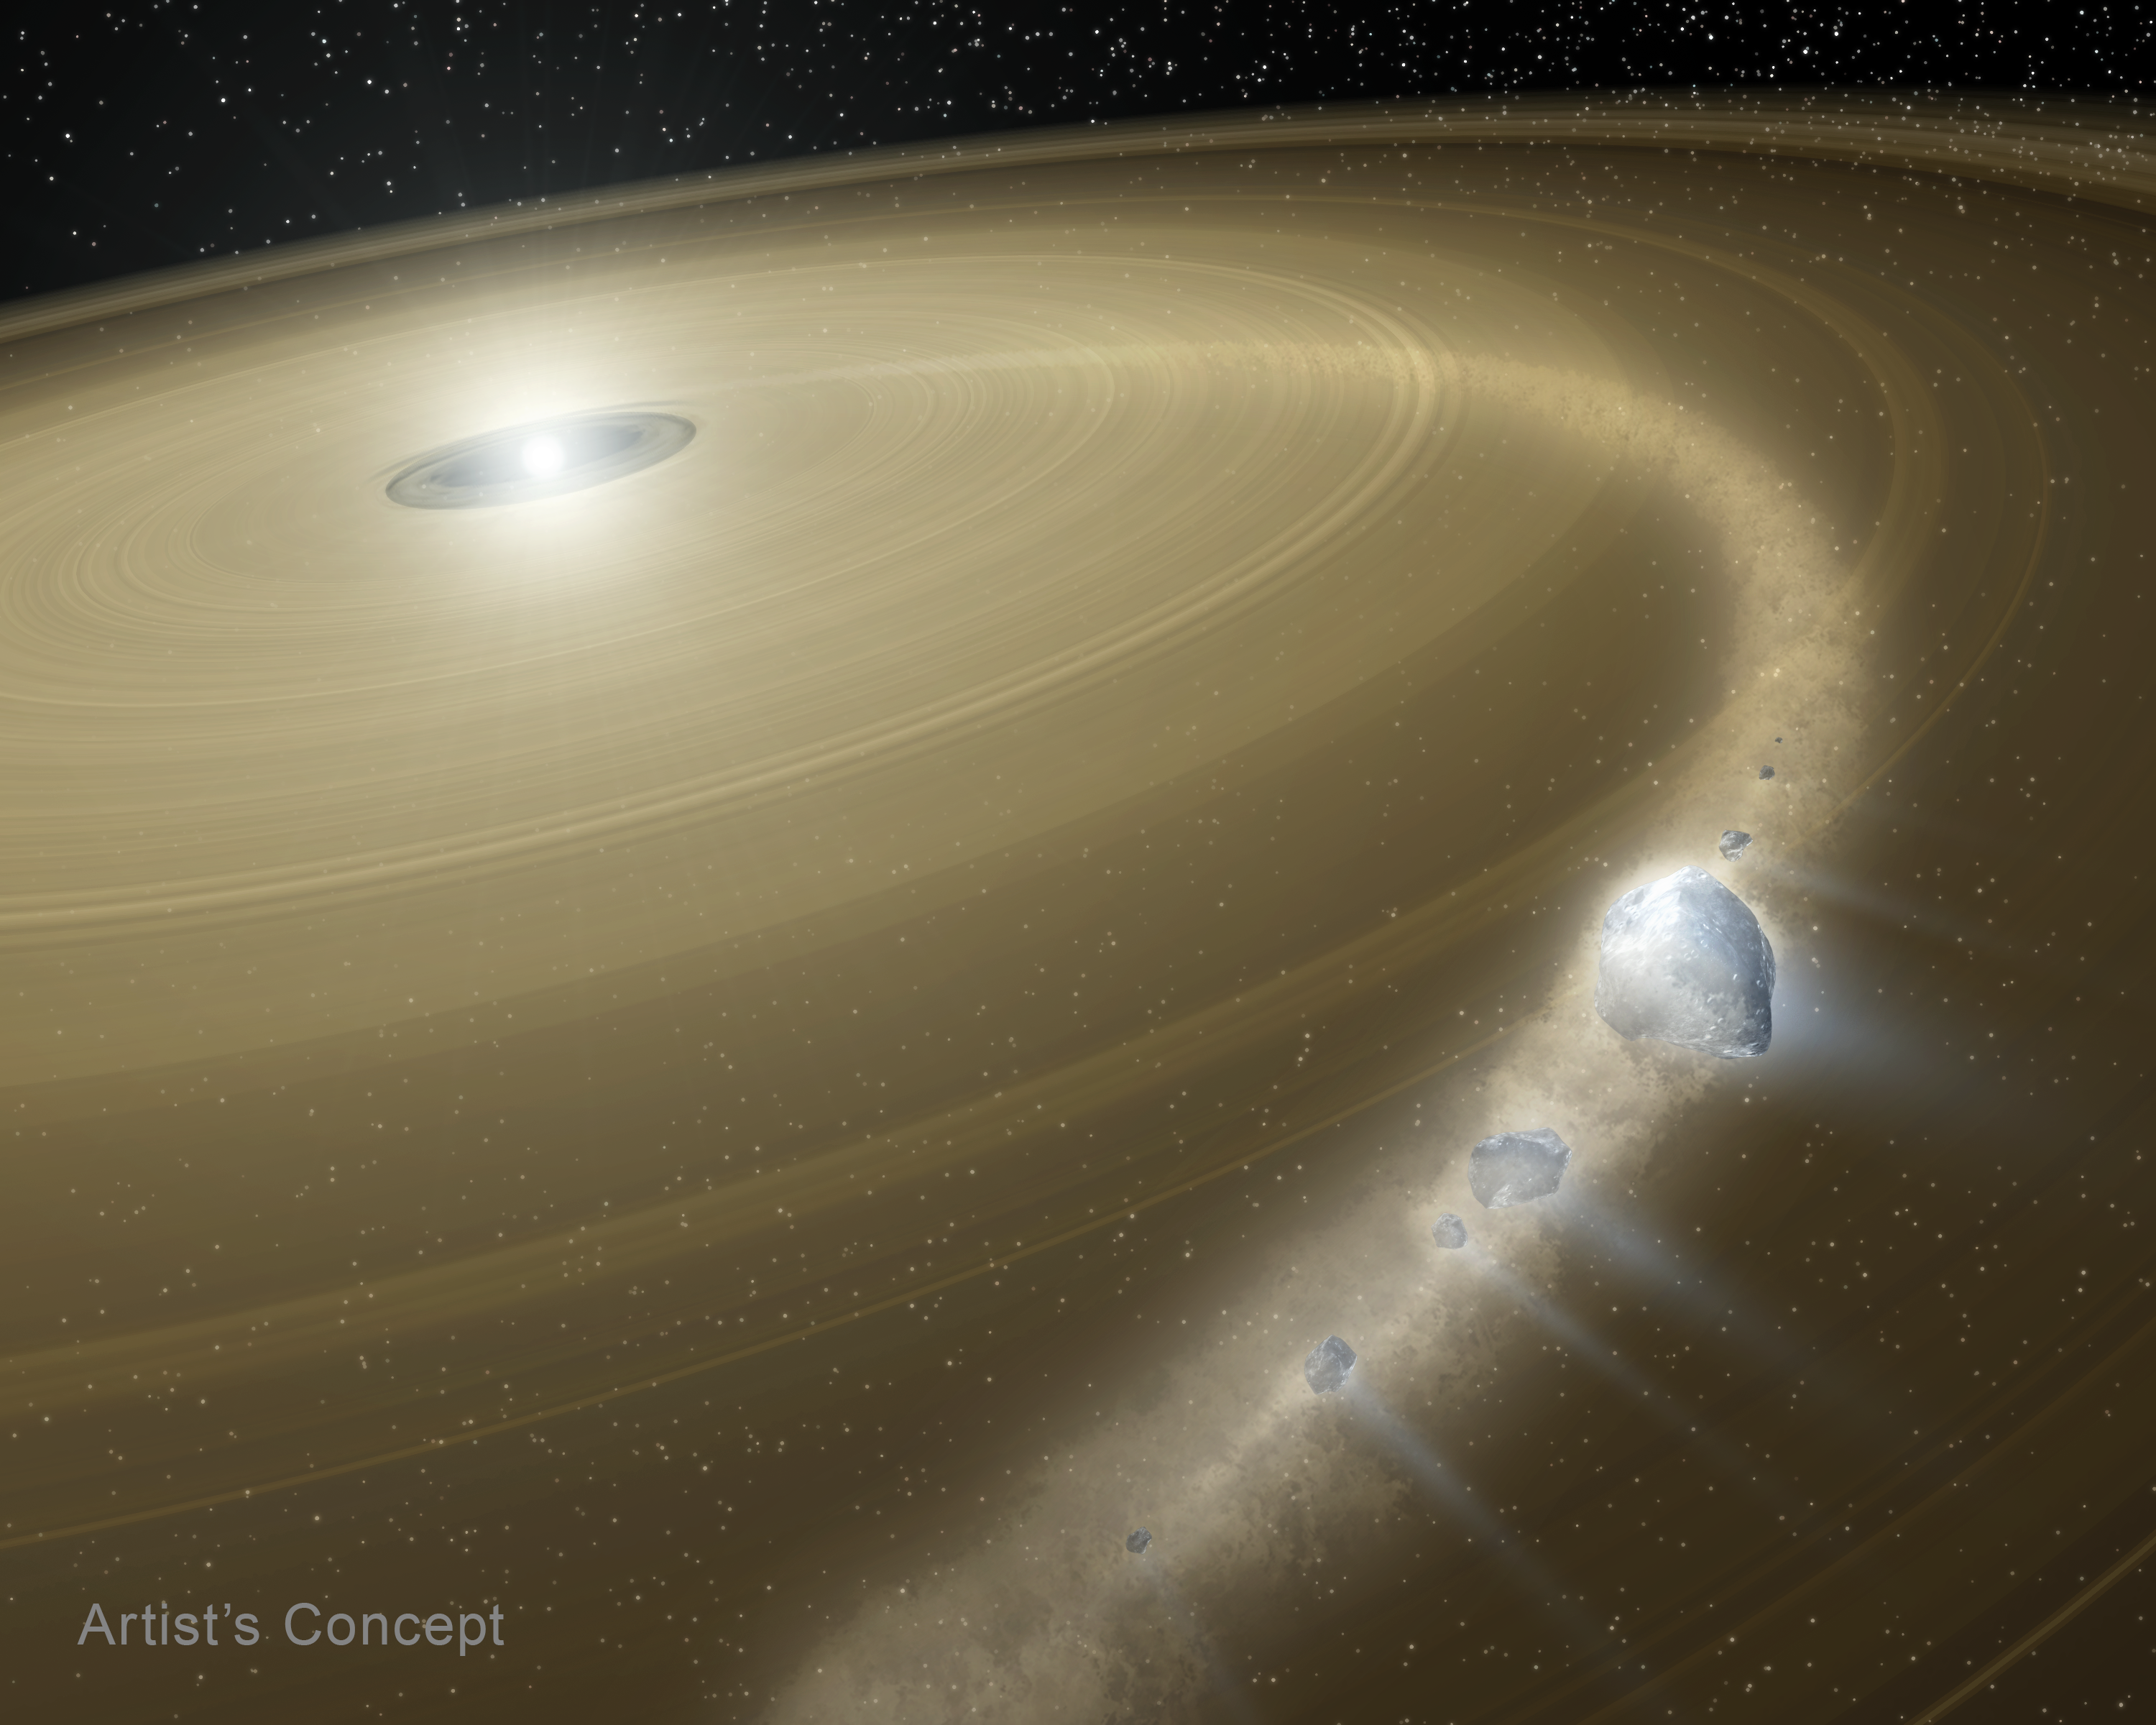

Artist’s impression of a white dwarf and debris disc

This artist’s concept shows a white dwarf surrounded by a large debris disc. Debris from pieces of a captured, Pluto-like object is falling onto the white dwarf.

Credit: T. Pyle (Caltech, NASA's Jet Propulsion Laboratory)